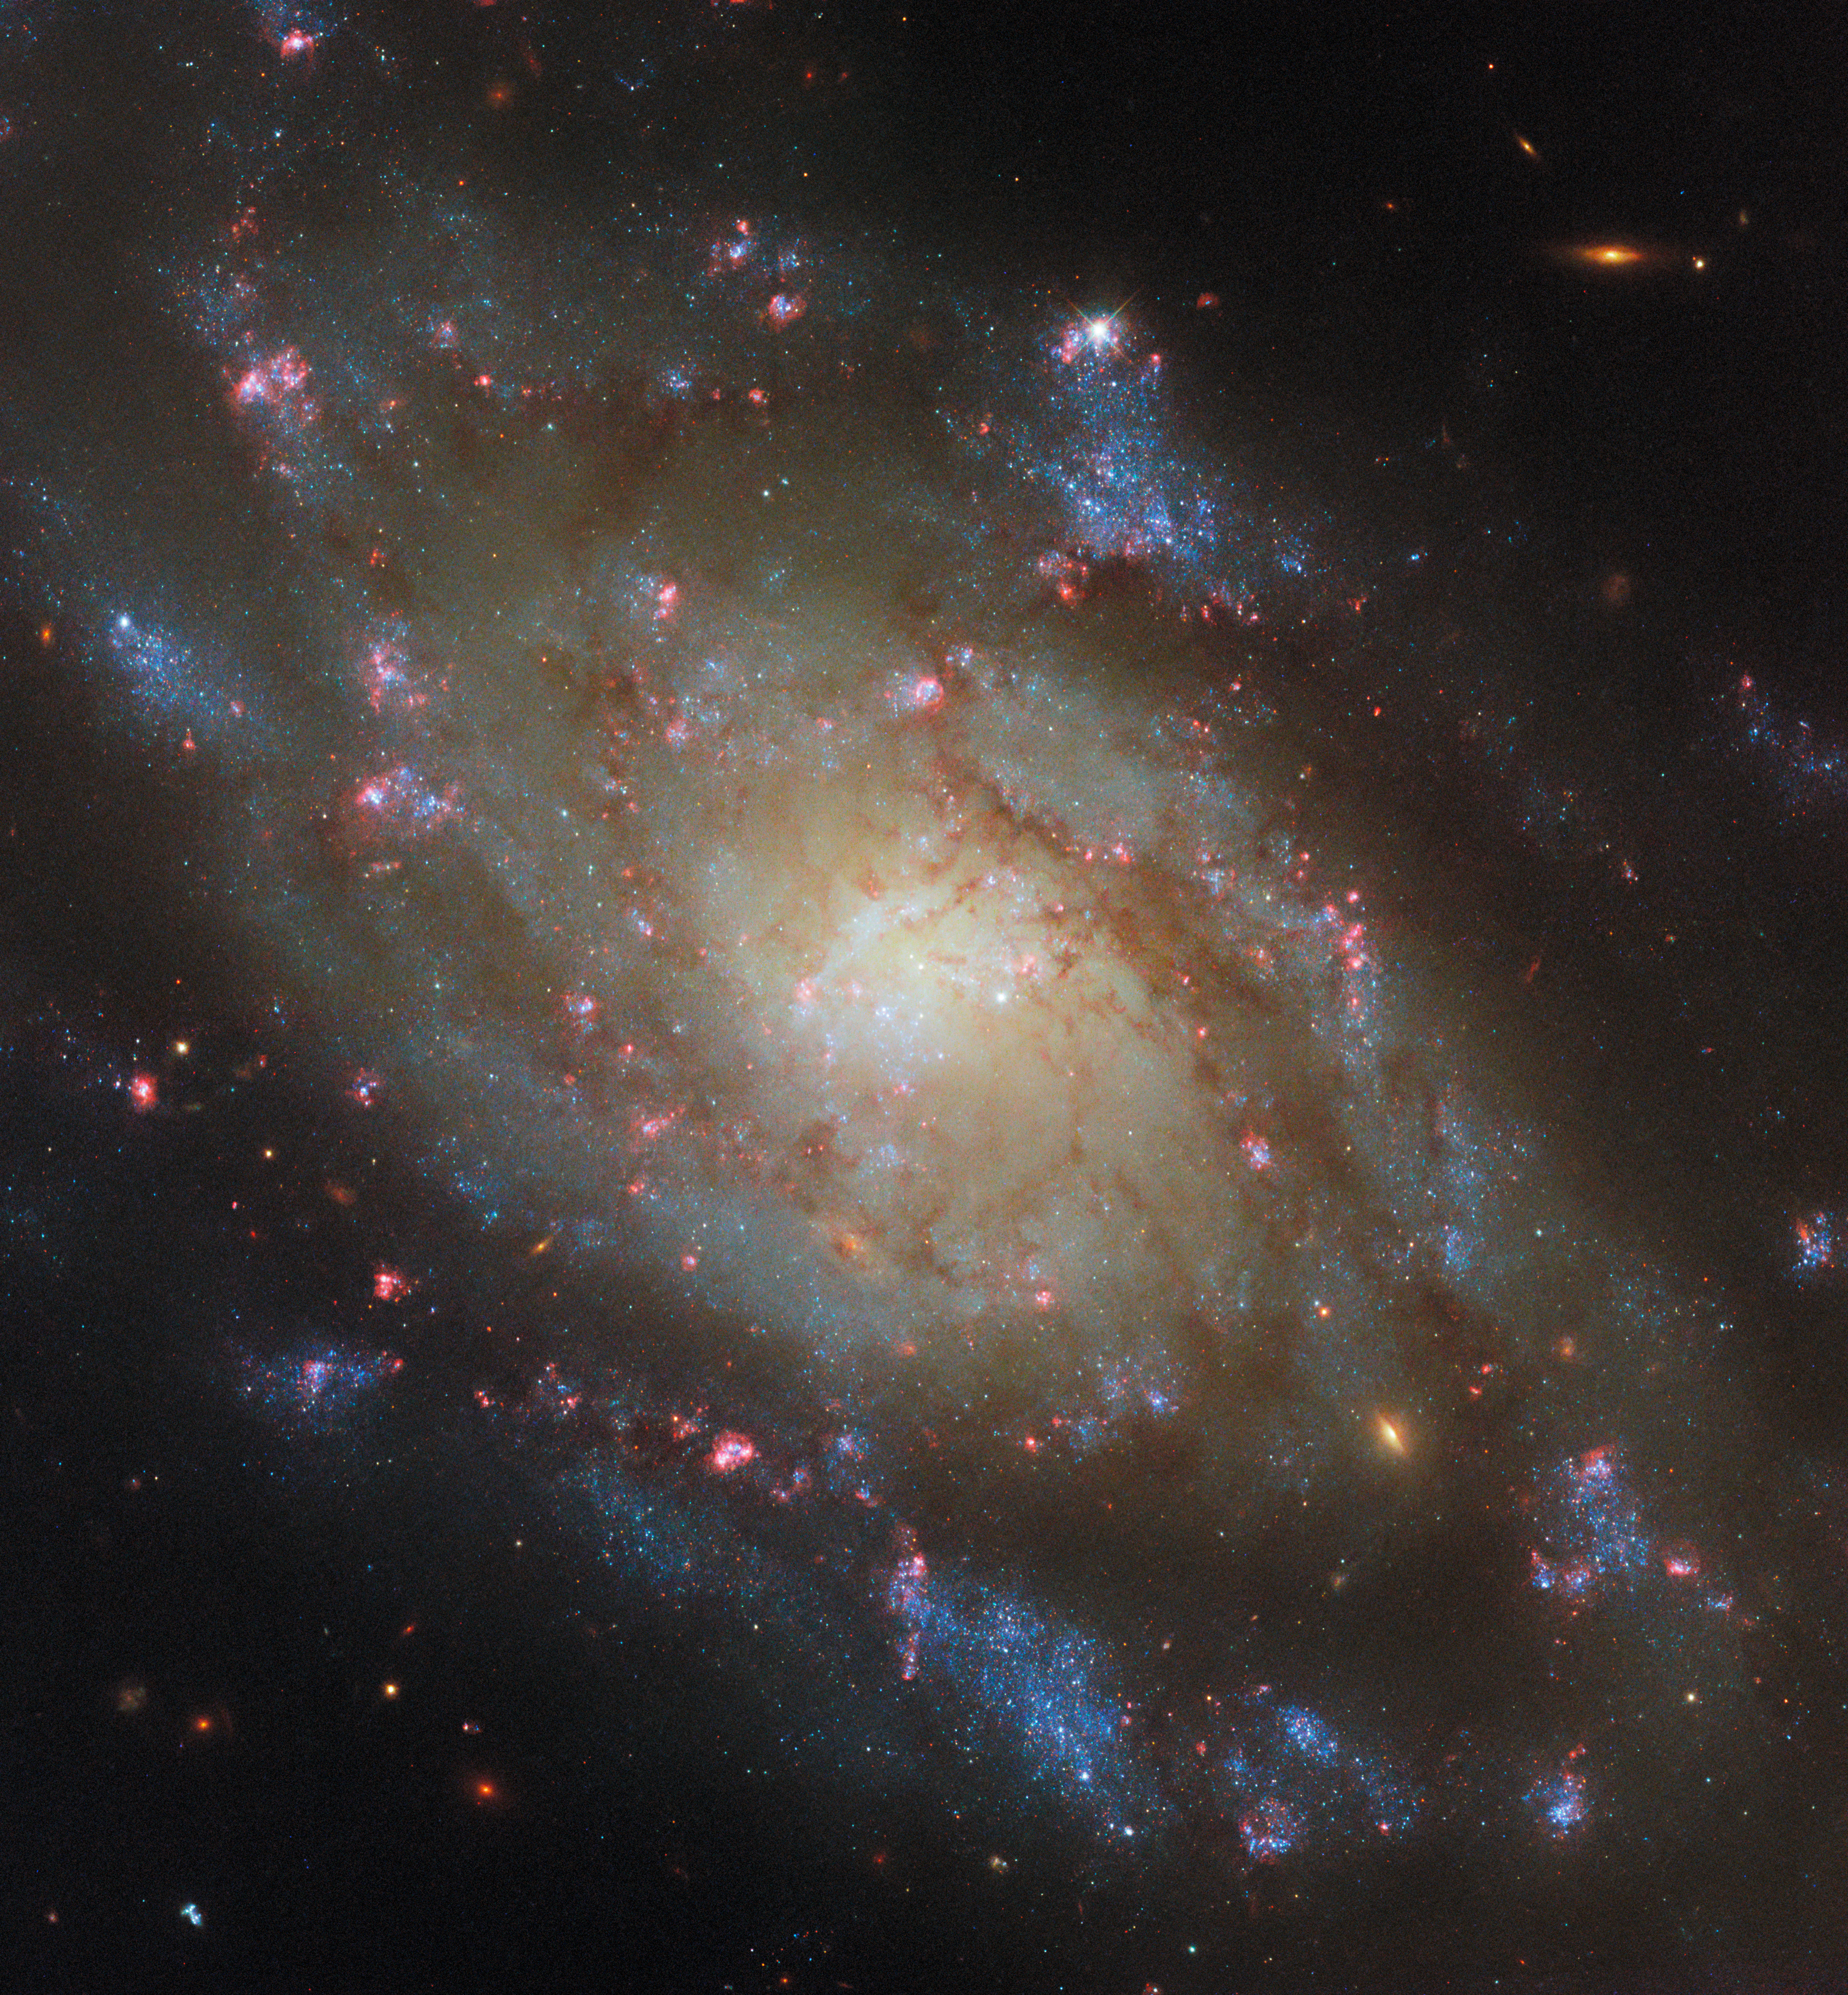

A spiral of the water snake

This vibrant spiral galaxy and the subject of today’s NASA/ESA Hubble Space Telescope Picture of the Week is NGC 5042, which resides about 48 million light-years from Earth in the constellation Hydra (the water snake). The galaxy nicely fills the frame of this Hubble image, with a single Milky Way star marked by cross-shaped diffraction spikes attempting to blend in with the bright stars along the galaxy’s edge.

Hubble observed NGC 5042 in six wavelength bands from the ultraviolet to the infrared to create this multicoloured portrait. The galaxy’s cream-coloured centre is packed with ancient stars, and the galaxy’s spiral arms are decorated with patches of young blue stars. The elongated yellow-orange objects that are scattered around the image are background galaxies far more distant than NGC 5042.

Perhaps NGC 5042’s most striking feature is its collection of brilliant pink gas clouds that are studded throughout its spiral arms. These flashy clouds are called H II (pronounced “H-two”) regions, and they get their distinctive colour from hydrogen atoms that have been ionised by ultraviolet light. If you look closely at this image, you’ll see that many of these reddish clouds are associated with clumps of blue stars, often appearing to form a shell around the stars.

H II regions arise in expansive clouds of hydrogen gas, and only hot and massive stars produce enough high-energy light to create an H II region. Because the stars capable of creating H II regions only live for a few million years — just a blink of an eye in galactic terms — this image represents a fleeting snapshot of life in this galaxy.

Credit: ESA/Hubble & NASA, D. Thilker